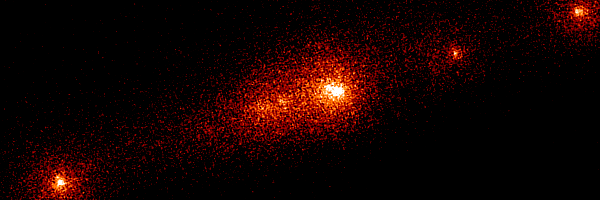

Shoemaker-Levy 9

This Hubble Space Telescope image shows the P-Q complex, also called the "gang of four' region, of Comet P/Shoemaker-Levy 9. It was taken on 1 July 1993 with the Planetary Camera before the December 1993 HST servicing mission.

Credit: Dr. H. A. Weaver, Mr. T. E. Smith, and Mr. K. B. Jones (STScI), and NASA